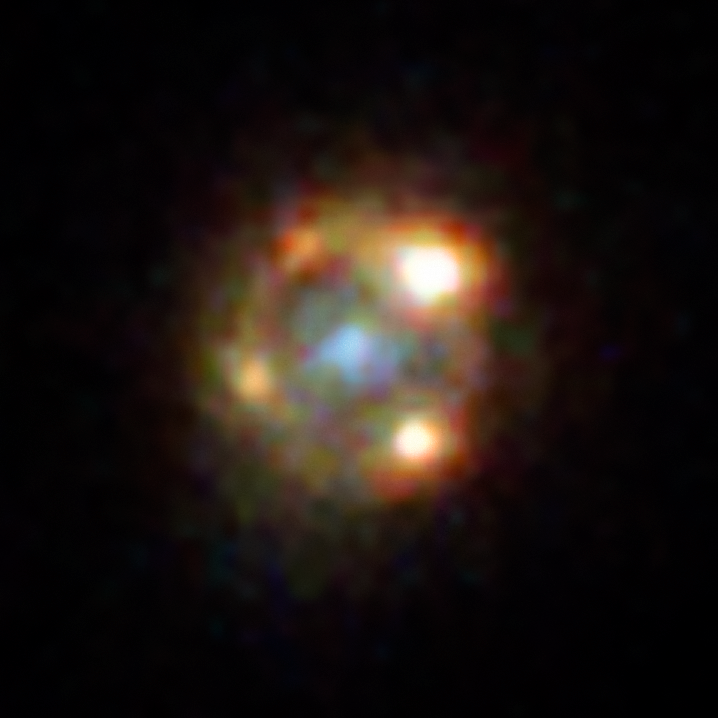

Hubble’s view on lensed supernova

The supernova iPTF16geu exploded at a distance corresponding to a time 4.3 billion years ago. It could only be detected because a foreground galaxy lensed the light of the explosion, making it 52 times brighter for observers on Earth. It also caused the supernova to appear in four distinct places on the sky, surrounding the lensing galaxy in the foreground.

Credit: ESA/Hubble, NASA